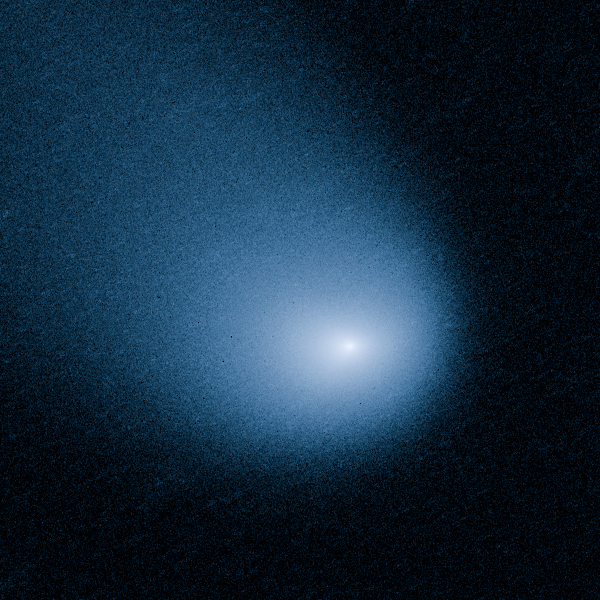

Comet Siding Spring

This is an unprocessed close up image of Comet Siding Spring.

Comet Siding Spring is plunging toward the Sun along a roughly 1-million-year orbit. The comet, discovered in 2013, was within the radius of Jupiter's orbit when the Hubble Space Telescope photographed it on March 11, 2014.

Hubble resolves two jets of dust coming from the solid icy nucleus. These persistent jets were first seen in Hubble pictures taken on Oct. 29, 2013. The feature should allow astronomers to measure the direction of the nucleus's pole, and hence, rotation axis.

The comet will make its closest approach to our Sun on Oct. 25, 2014, at a distance of 130 million miles, well outside Earth's orbit. On its inbound leg, Comet Siding Spring will pass within 84,000 miles of Mars on Oct. 19, 2014, which is less than half the Moon's distance from Earth. The comet is not expected to become bright enough to be seen by the naked eye.

Credit: NASA, ESA, and J.-Y. Li (Planetary Science Institute)